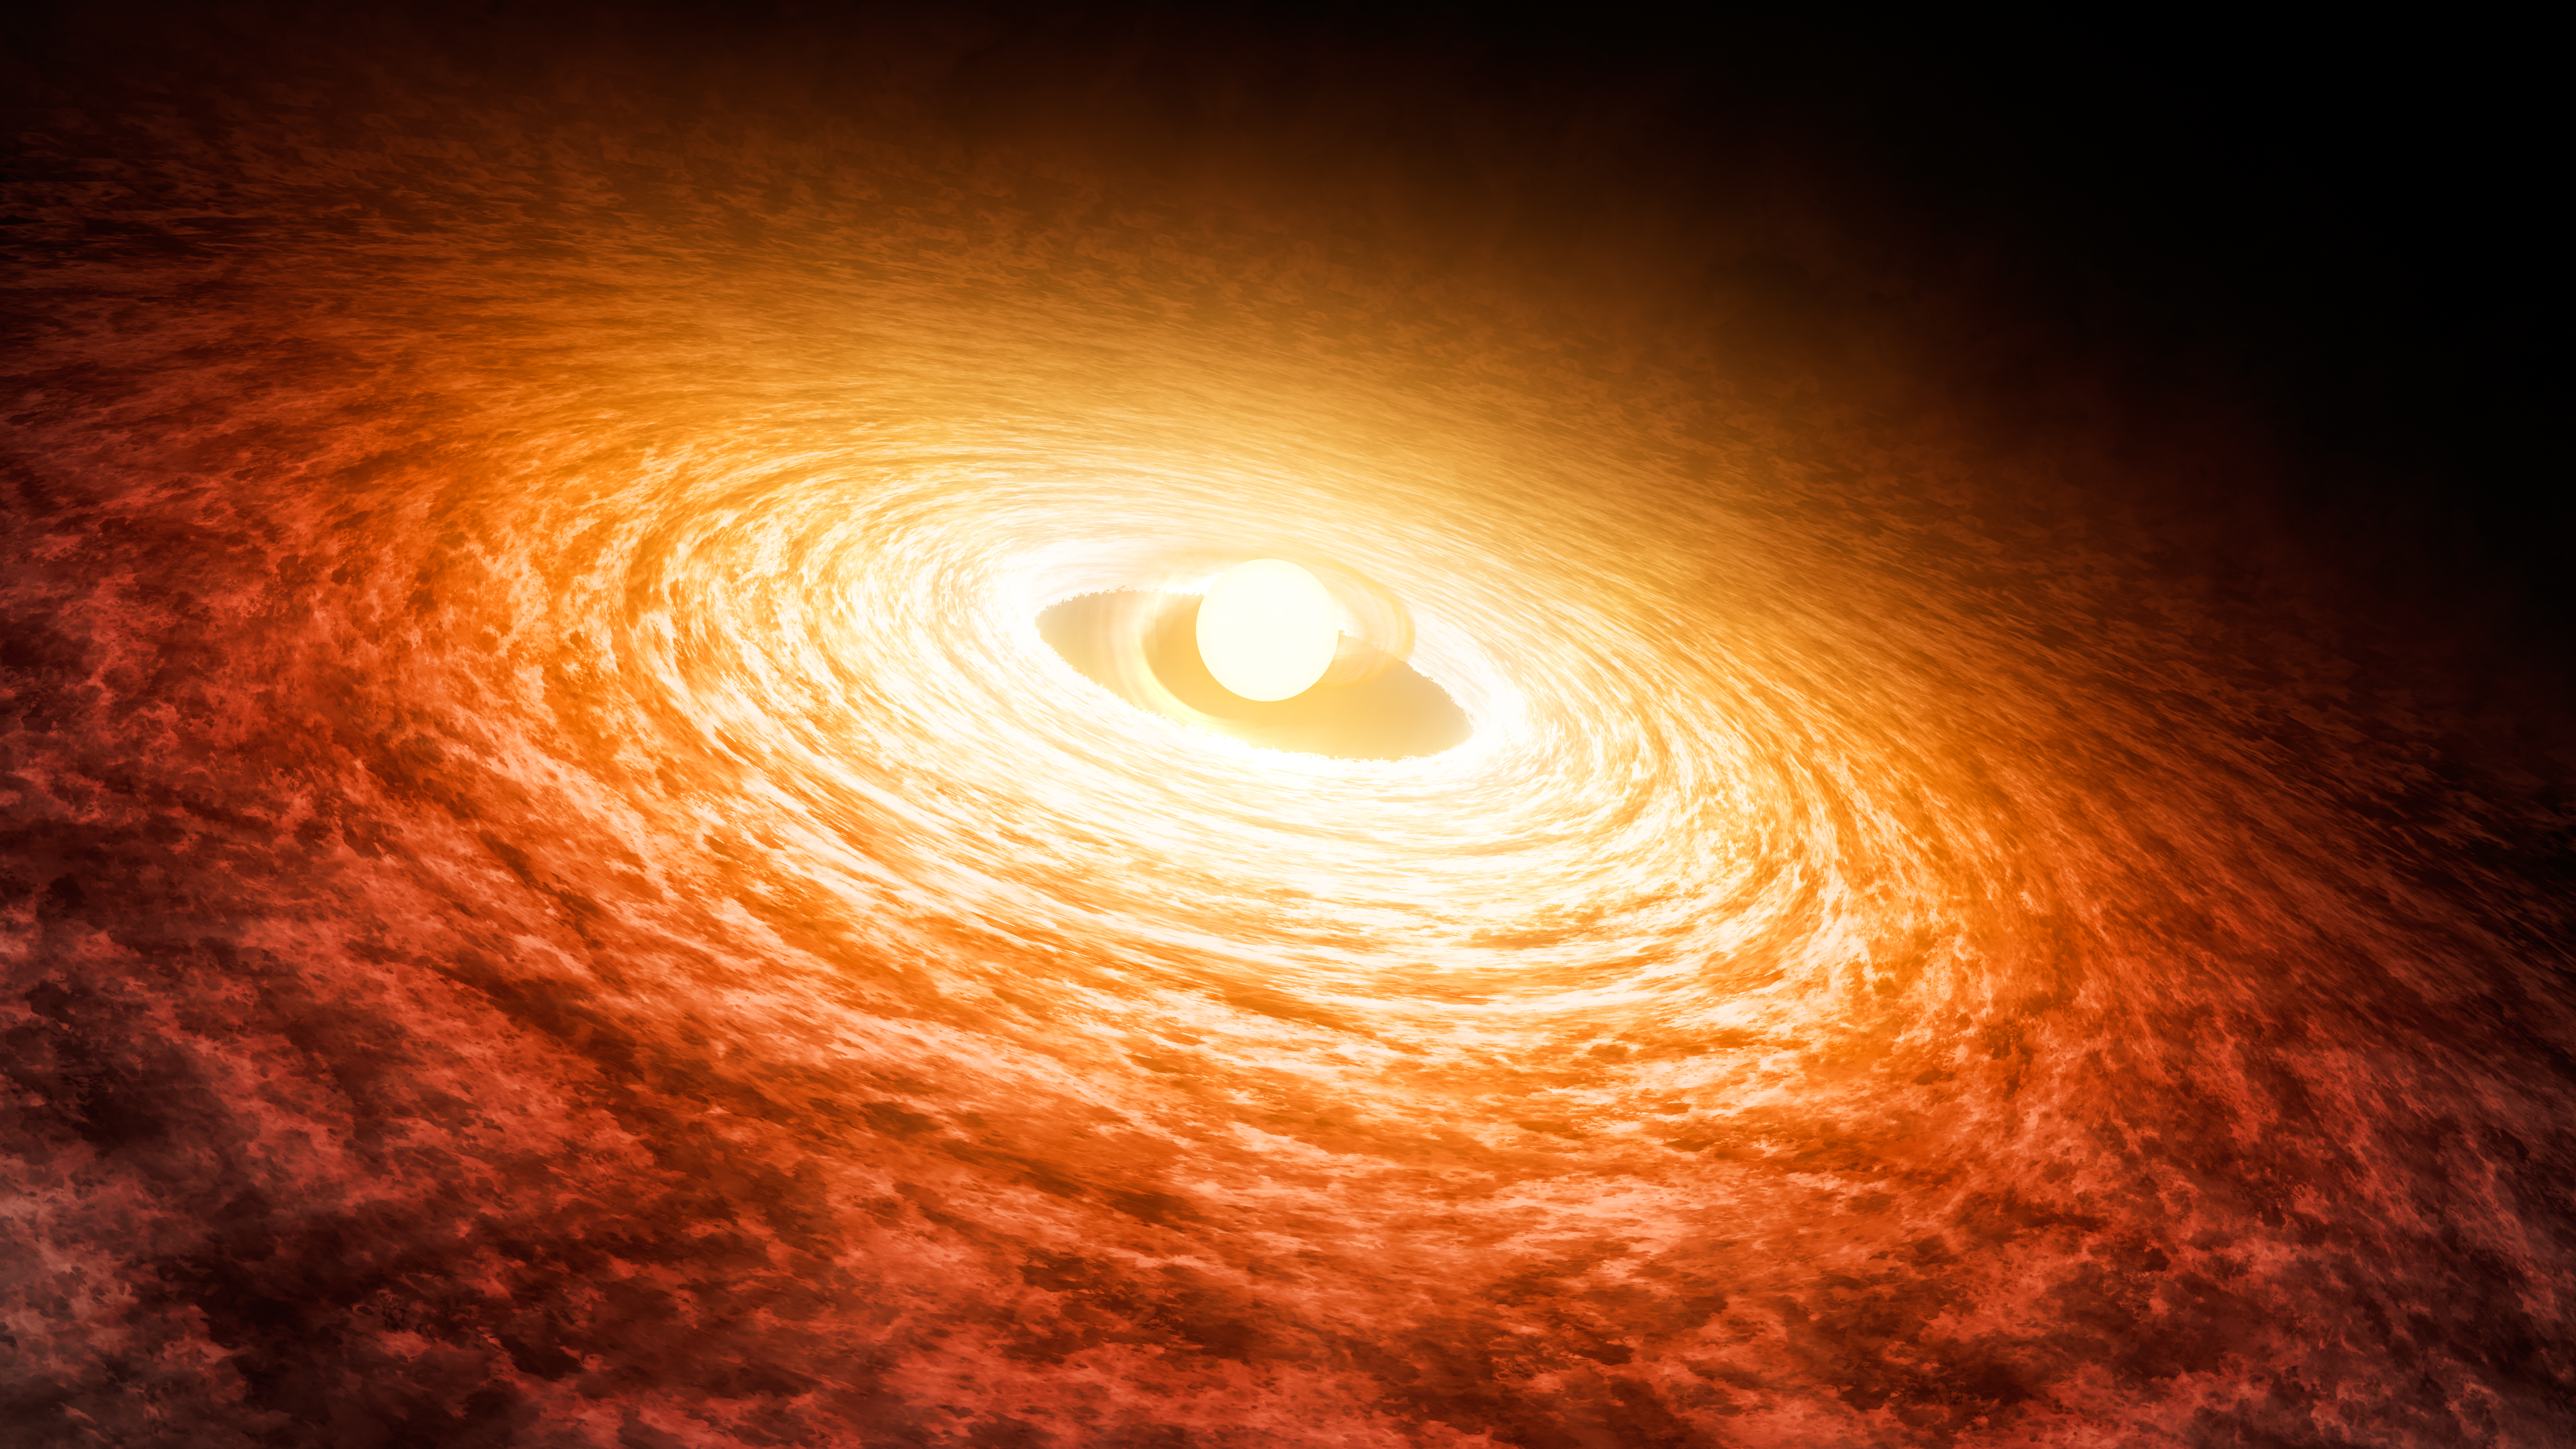

Early stages of the FU Orionis outburst (artist’s concept)

This is an artist’s concept of the early stages of the young star FU Orionis (FU Ori) outburst, surrounded by a disk of material. A team of astronomers has used the NASA/ESA Hubble Space Telescope’s ultraviolet capabilities to learn more about the interaction between FU Ori’s stellar surface and the accretion disk that has been dumping gas onto the growing star for nearly 90 years. They found that the inner disc, touching the star, is much hotter than expected—16,000 kelvins—nearly three times our Sun’s surface temperature. That sizzling temperature is nearly twice as hot as previously believed.

Credit: NASA-JPL, Caltech